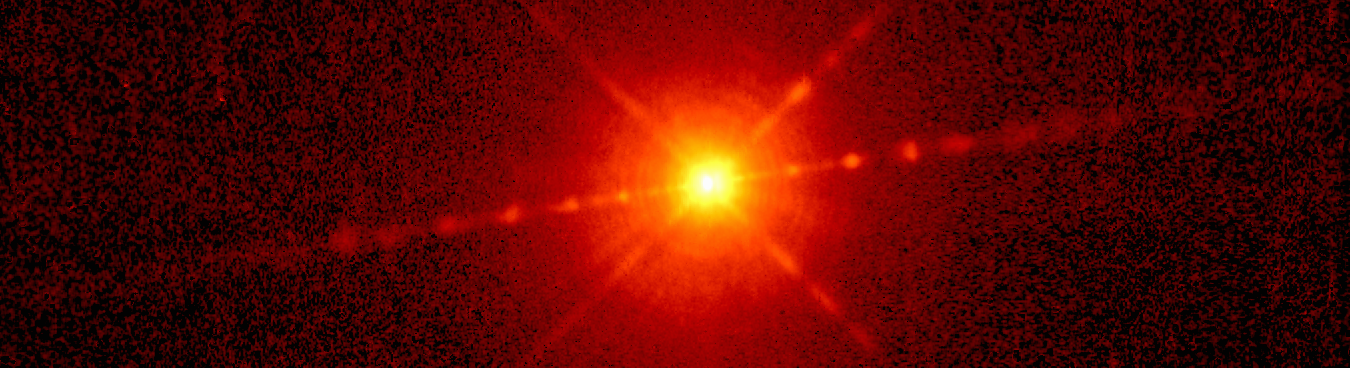

Hen 2-90

This Hubble picture shows a centrally bright object with jets, appearing like strings of beads, emanating from both sides of center. (The other streaks of light running diagonally from He2-90 are artificial effects of the telescope's optical system.) Each jet possesses at least six bright clumps of gas, which are speeding along at rates estimated to be at least 375, 000 miles an hour (600, 000 kilometers an hour).

Credit: NASA/ESA, Raghvendra Sahai (NASA/ESA Jet Propulsion Laboratory), Lars-Ake Nyman (European Southern Observatory, Chile & Onsala Space Observatory, Sweden).